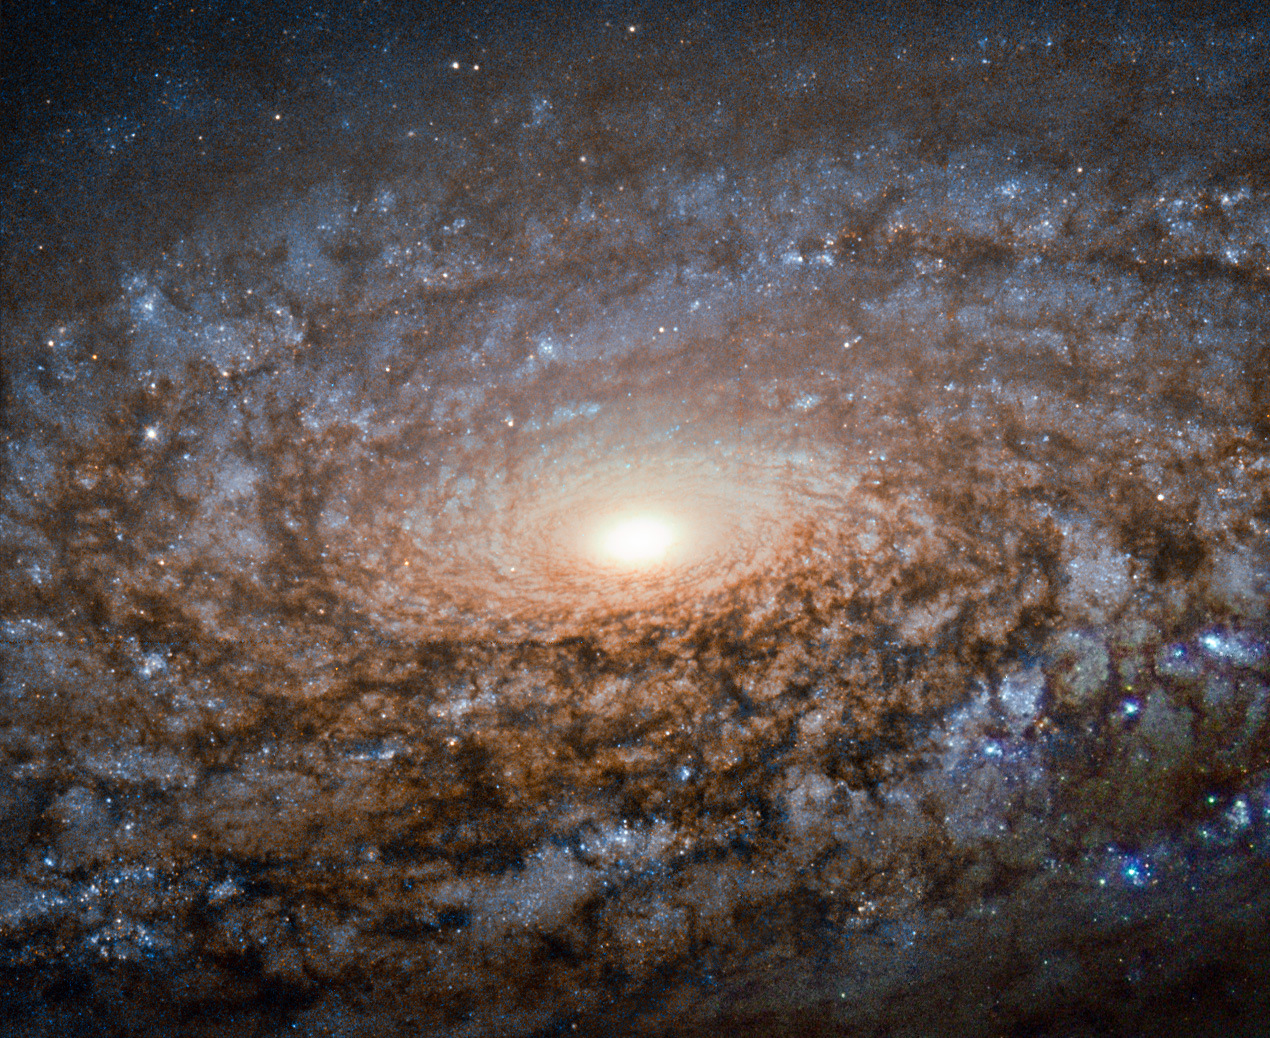

Hubble shears a "woolly" galaxy

This new image of the spiral galaxy NGC 3521 from the NASA/ESA Hubble Space Telescope is not out of focus. Instead, the galaxy itself has a soft, woolly appearance as it a member of a class of galaxies known as flocculent spirals.

Like other flocculent galaxies, NGC 3521 lacks the clearly defined, arcing structure to its spiral arms that shows up in galaxies such as Messier 101, which are called grand design spirals. In flocculent spirals, fluffy patches of stars and dust show up here and there throughout their discs. Sometimes the tufts of stars are arranged in a generally spiralling form, as with NGC 3521, but illuminated star-filled regions can also appear as short or discontinuous spiral arms.

About 30 percent of galaxies share NGC 3521's patchiness, while approximately 10 percent have their star-forming regions wound into grand design spirals.

NGC 3521 is located almost 40 million light-years away in the constellation of Leo (The Lion). The British astronomer William Herschel discovered the object in 1784. Through backyard telescopes, NGC 3521 can have a glowing, rounded appearance, giving rise to its nickname, the Bubble Galaxy.

Credit: ESA/Hubble & NASA and S. Smartt (Queen's University Belfast) Acknowledgement: Robert Gendler